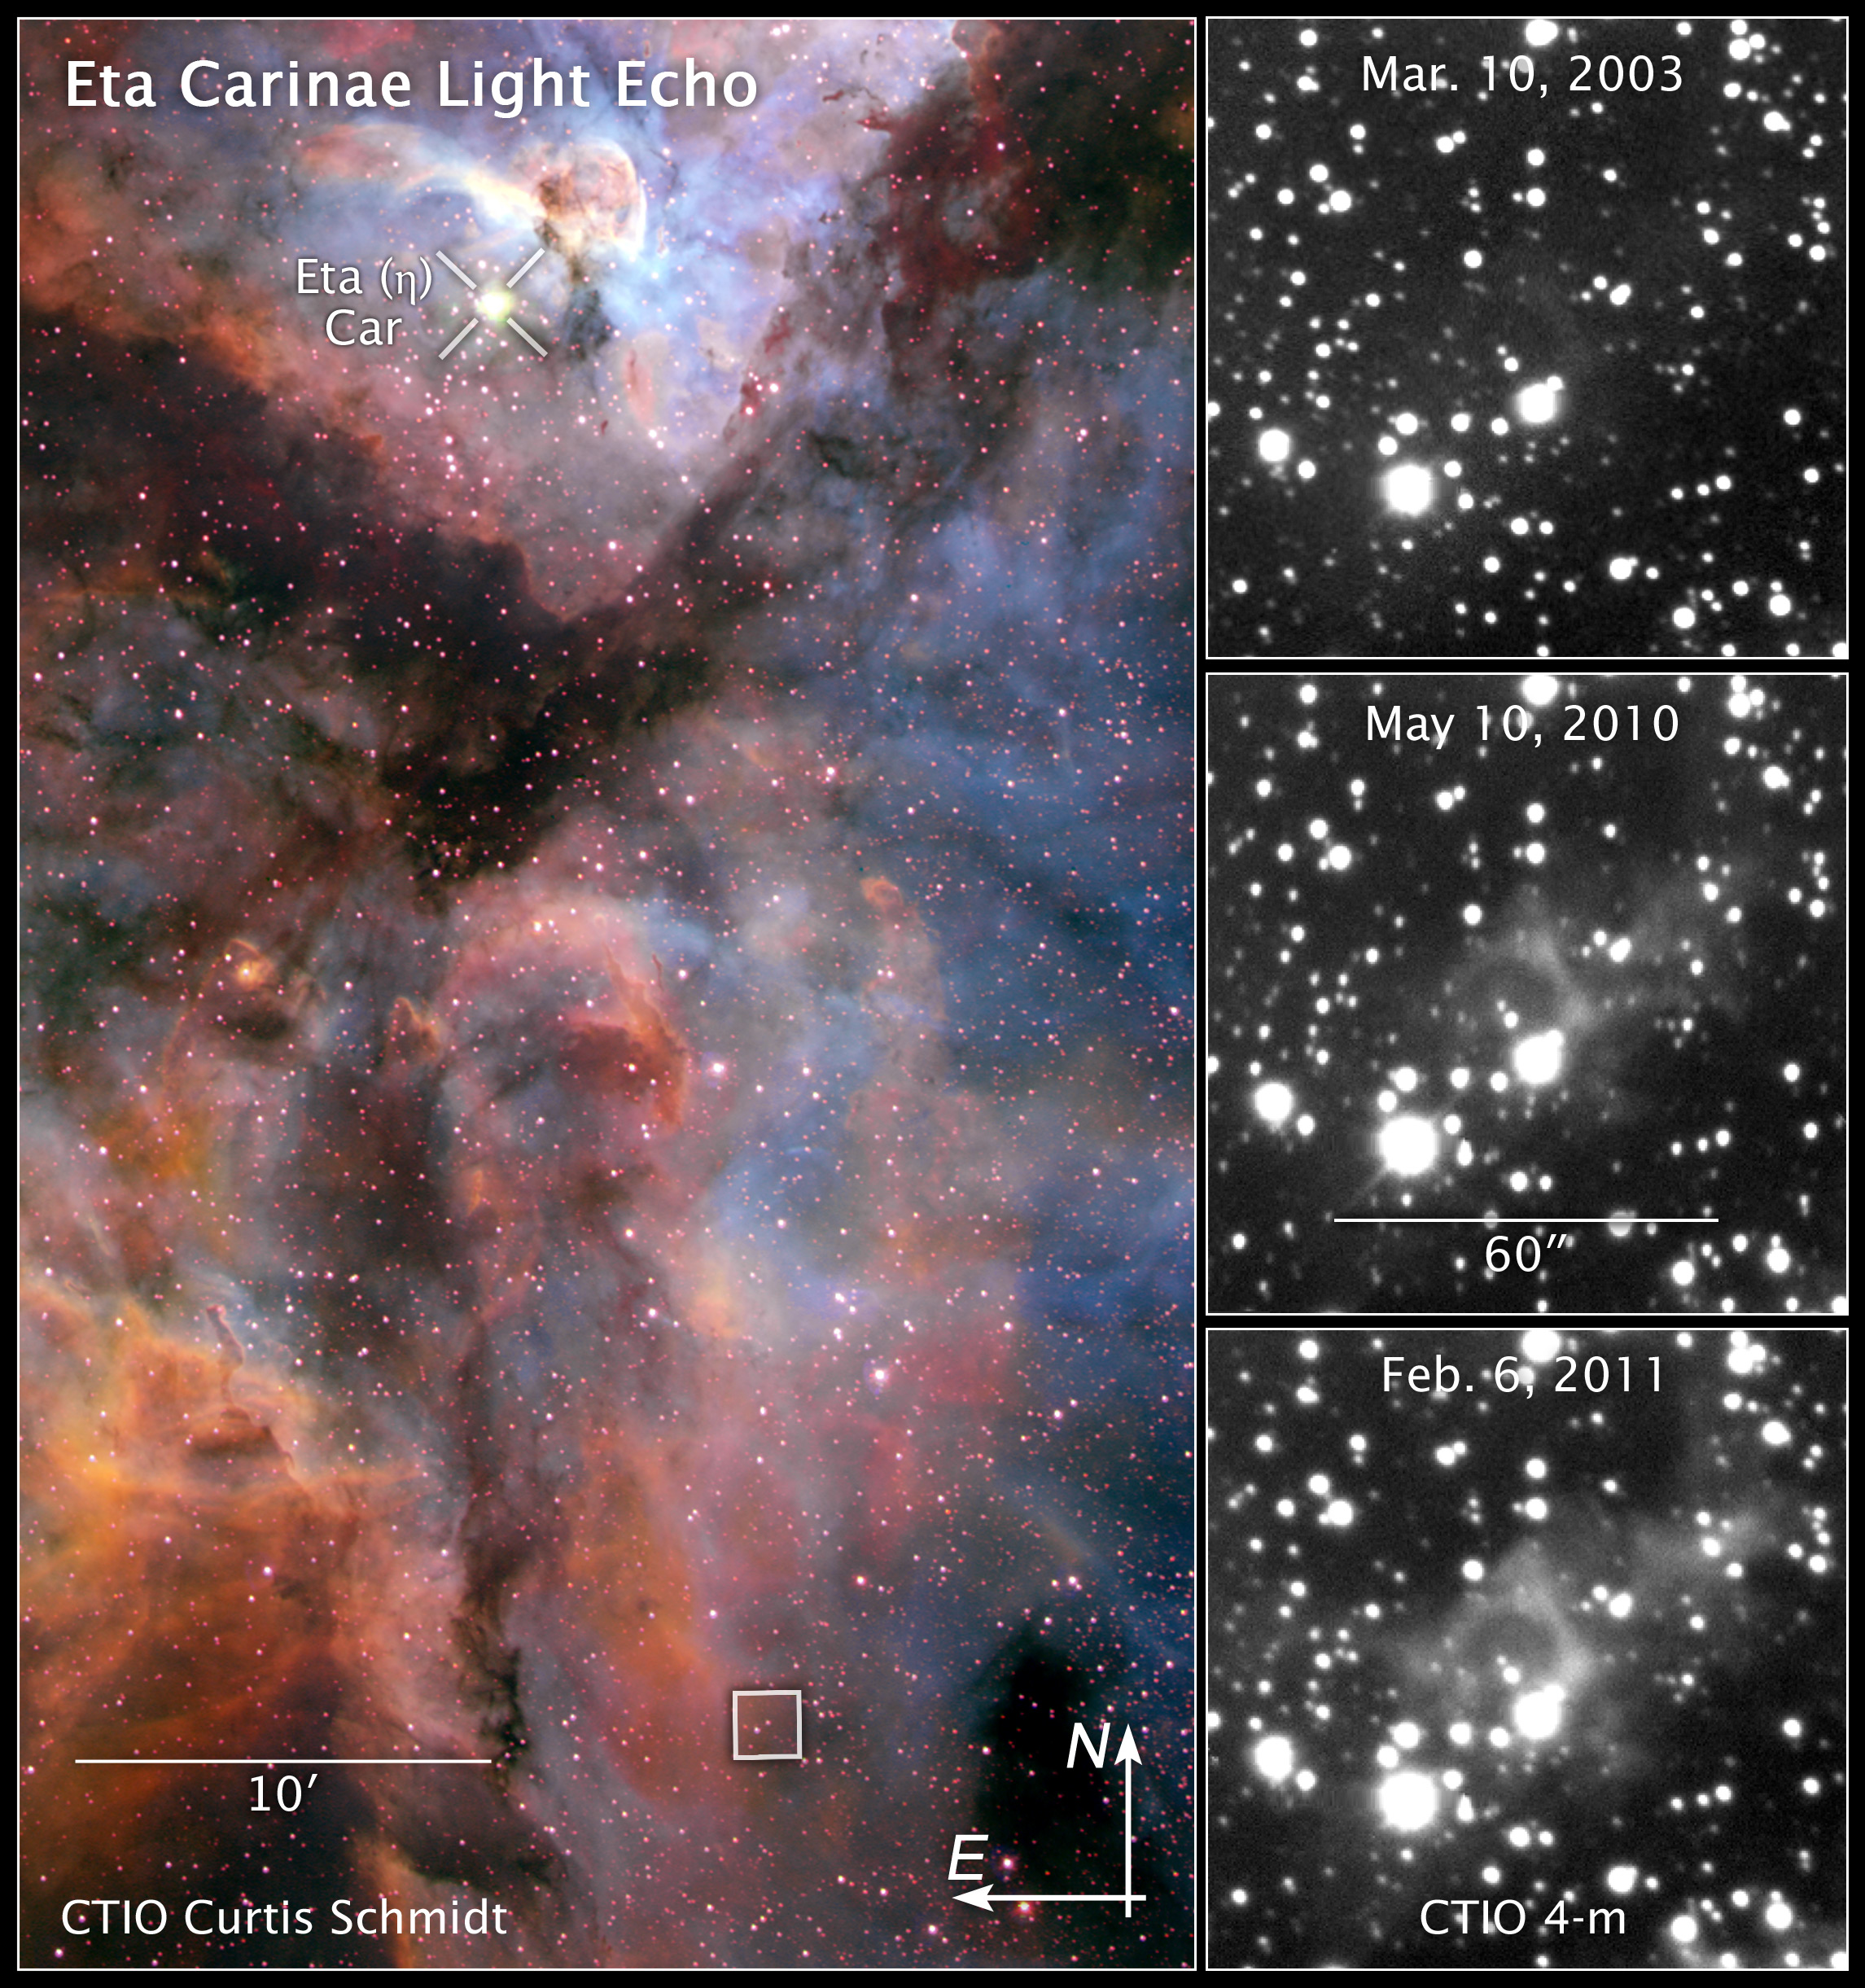

Compass and scale image of Eta Carinae light echo

Compass and scale image of Eta Carinae light echo.

Credit: NASA, ESA, and Z. Levay (STScI). Image Credit: NASA, NOAO, and A. Rest (Space Telescope Science Institute)